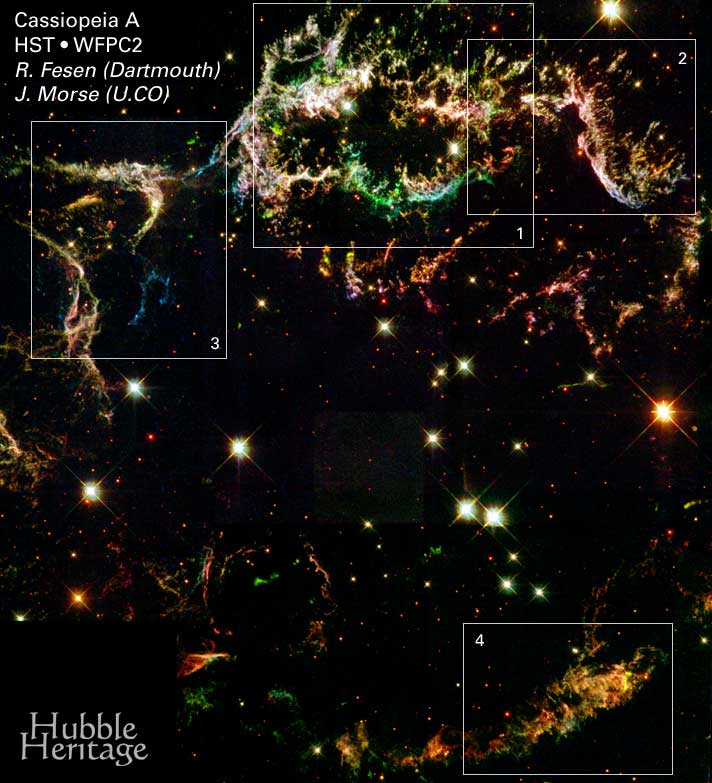

Full Mosaic With Outlines of Detail Sections and Center of Expansion Marked

Glowing gaseous streamers of red, white, and blue — as well as green and pink — illuminate the heavens like Fourth of July fireworks. The colorful streamers that float across the sky in this photo taken by NASA's Hubble Space Telescope were created by the universe's biggest firecracker, the titanic supernova explosion of a massive star.

Credit: NASA/ESA and the Hubble Heritage Team (STScI/AURA)